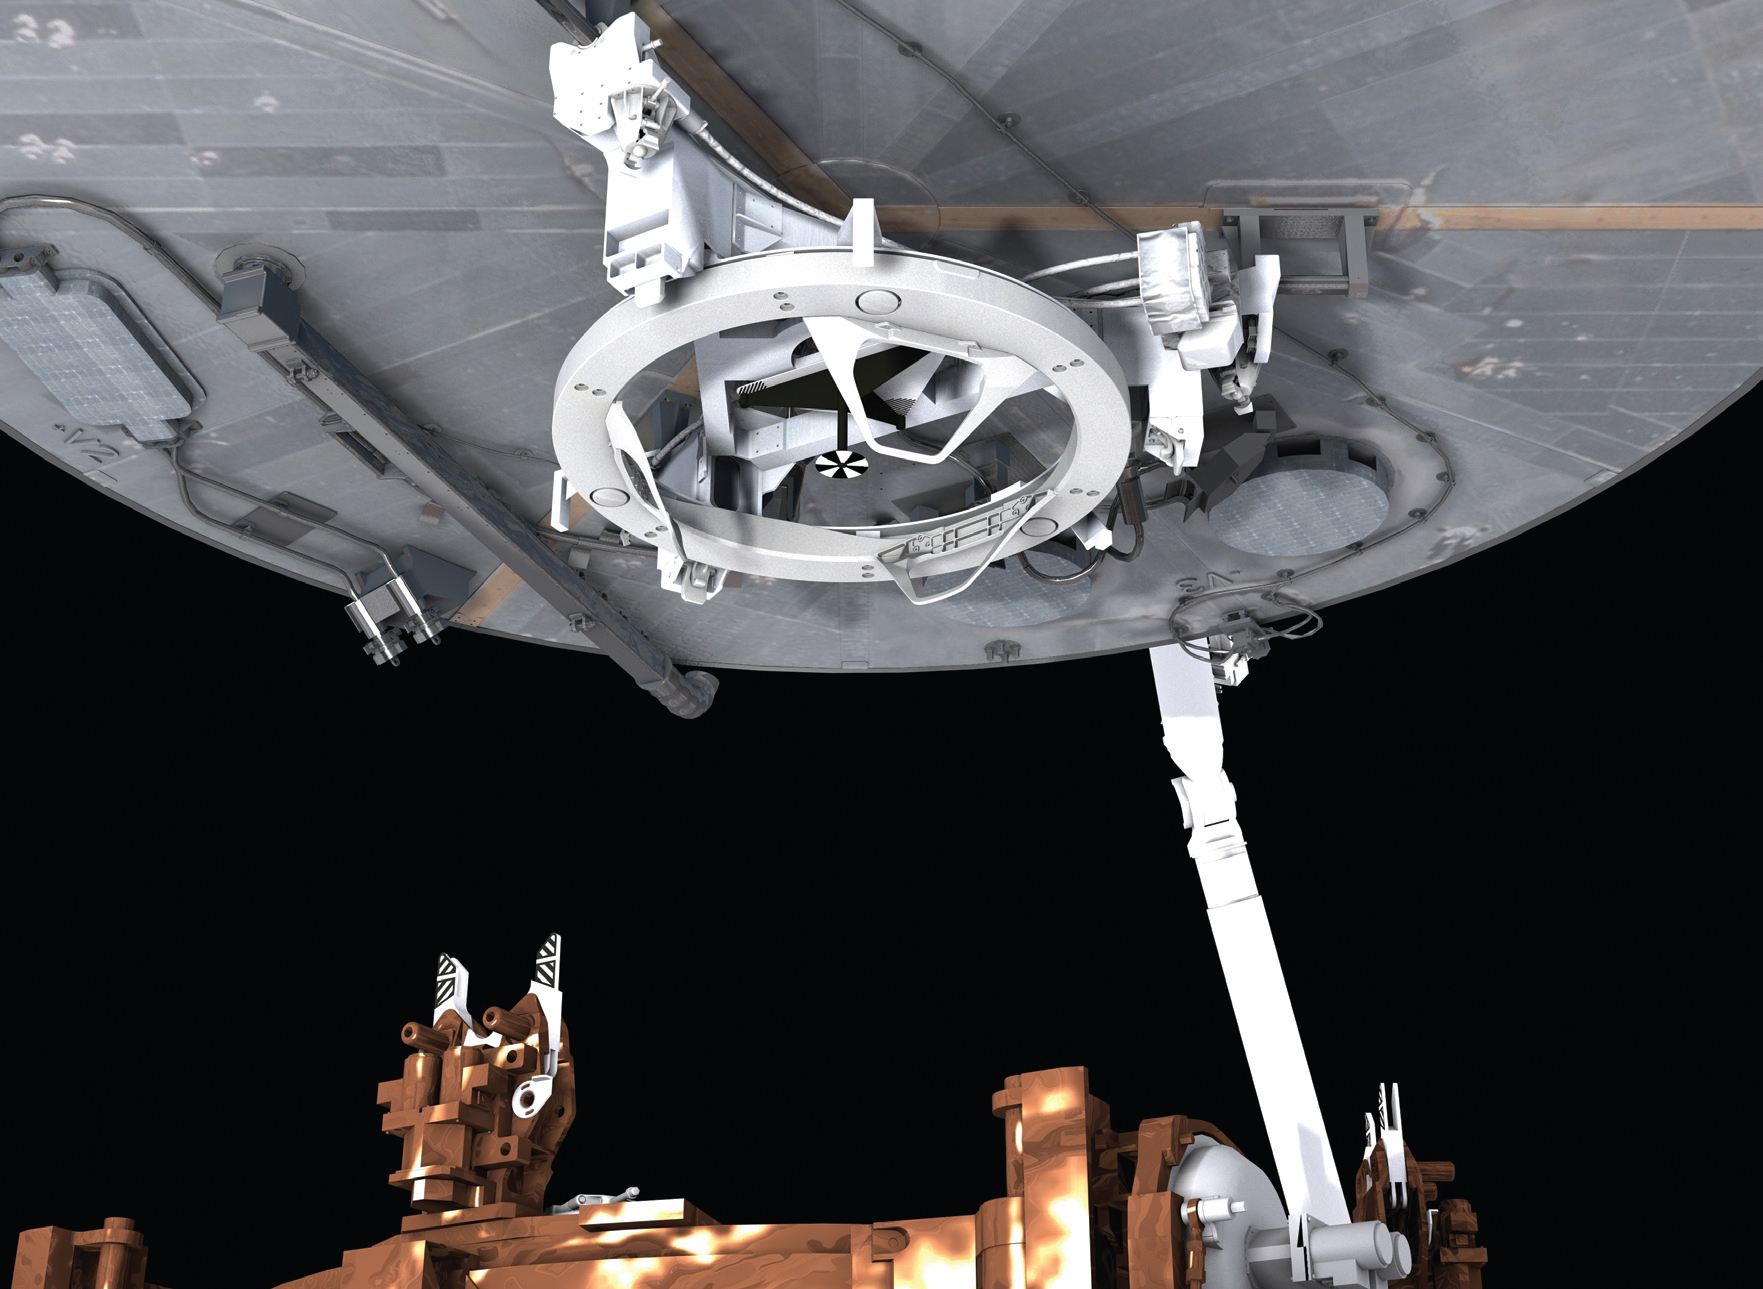

Soft capture mechanism

Shown here in the top center is the Soft Capture Mechanism–-the ring-like device that attaches to Hubble’s aft bulkhead.

Credit: NASA